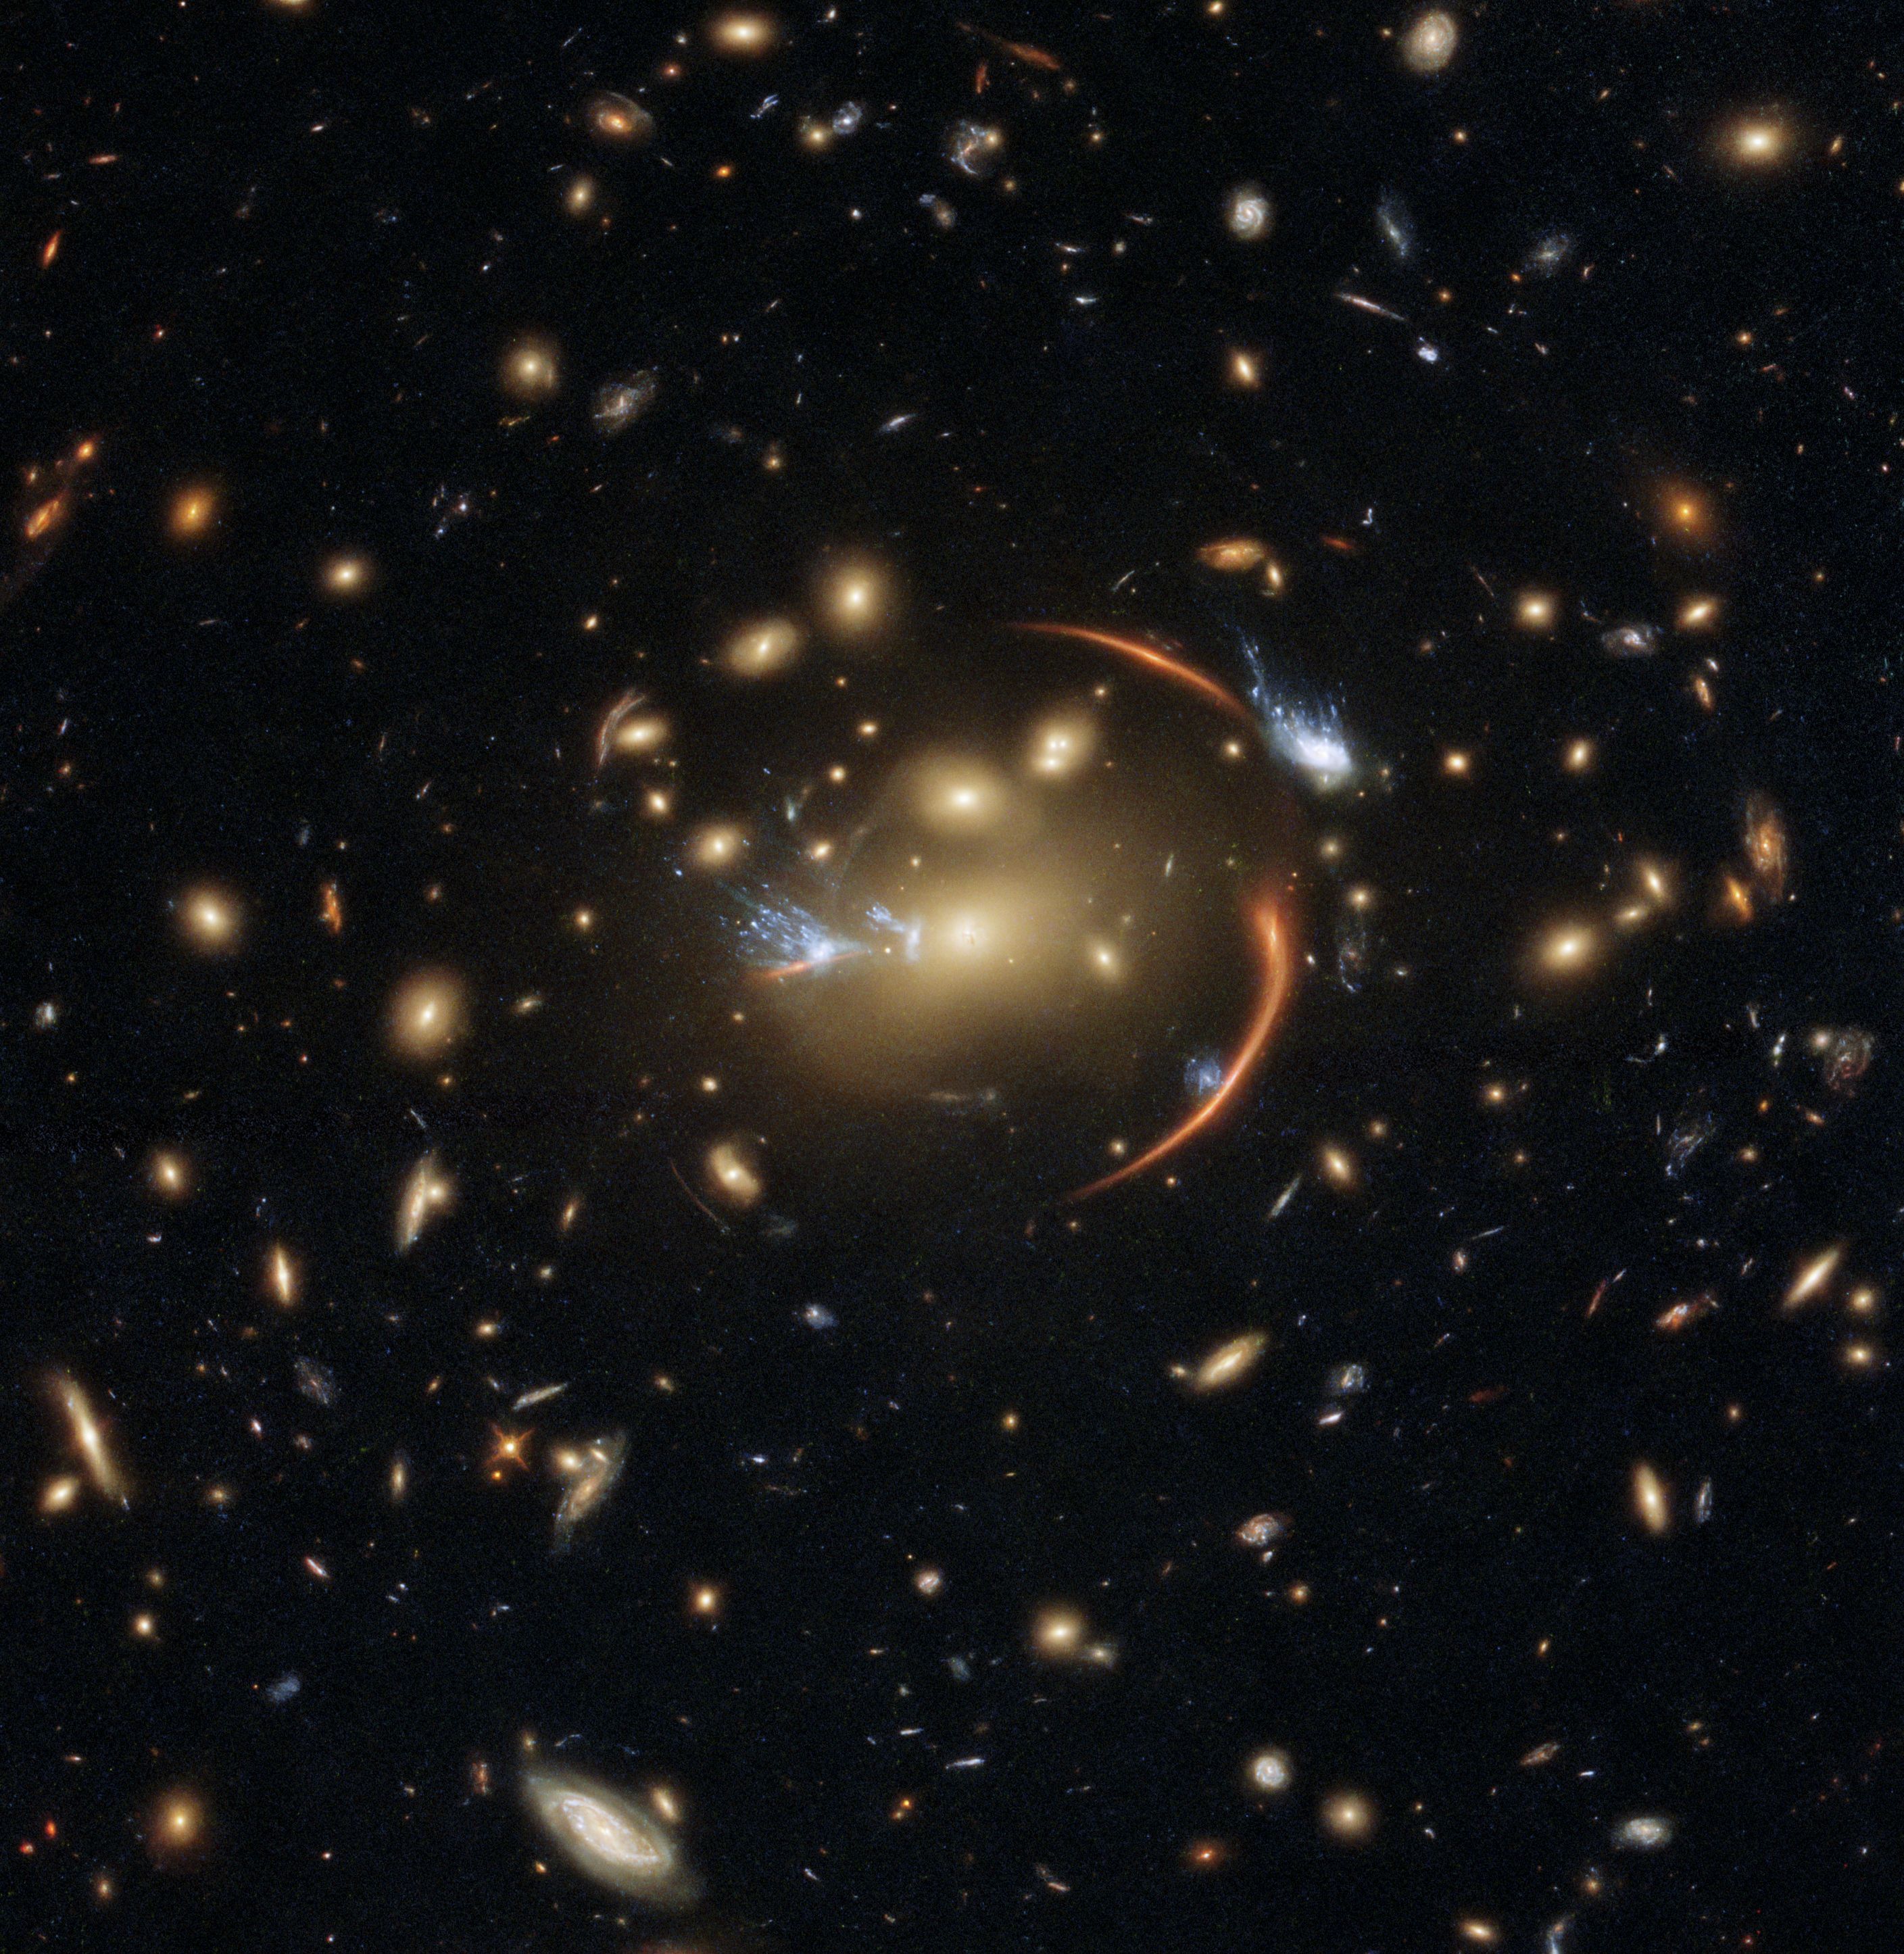

Cosmic Lens Flare

The centre of this image from the NASA/ESA Hubble Space Telescope is framed by the tell-tale arcs that result from strong gravitational lensing, a striking astronomical phenomenon which can warp, magnify, or even duplicate the appearance of distant galaxies.

Gravitational lensing occurs when light from a distant galaxy is subtly distorted by the gravitational pull of an intervening astronomical object. In this case, the relatively nearby galaxy cluster MACSJ0138.0-2155 has lensed a significantly more distant quiescent galaxy — a slumbering giant known as MRG-M0138 which has run out of the gas required to form new stars and is located 10 billion light years away. Astronomers can use gravitational lensing as a natural magnifying glass, allowing them to inspect objects like distant quiescent galaxies which would usually be too difficult for even Hubble to resolve.

This image was made using observations from eight different infrared filters spread across two of Hubble’s most advanced astronomical instruments: the Advanced Camera for Surveys and the Wide Field Camera 3. These instruments were installed by astronauts during the final two servicing missions to Hubble, and provide astronomers with superbly detailed observations across a large area of sky and a wide range of wavelengths.

Credit: ESA/Hubble & NASA, A. Newman, M. Akhshik, K. Whitaker